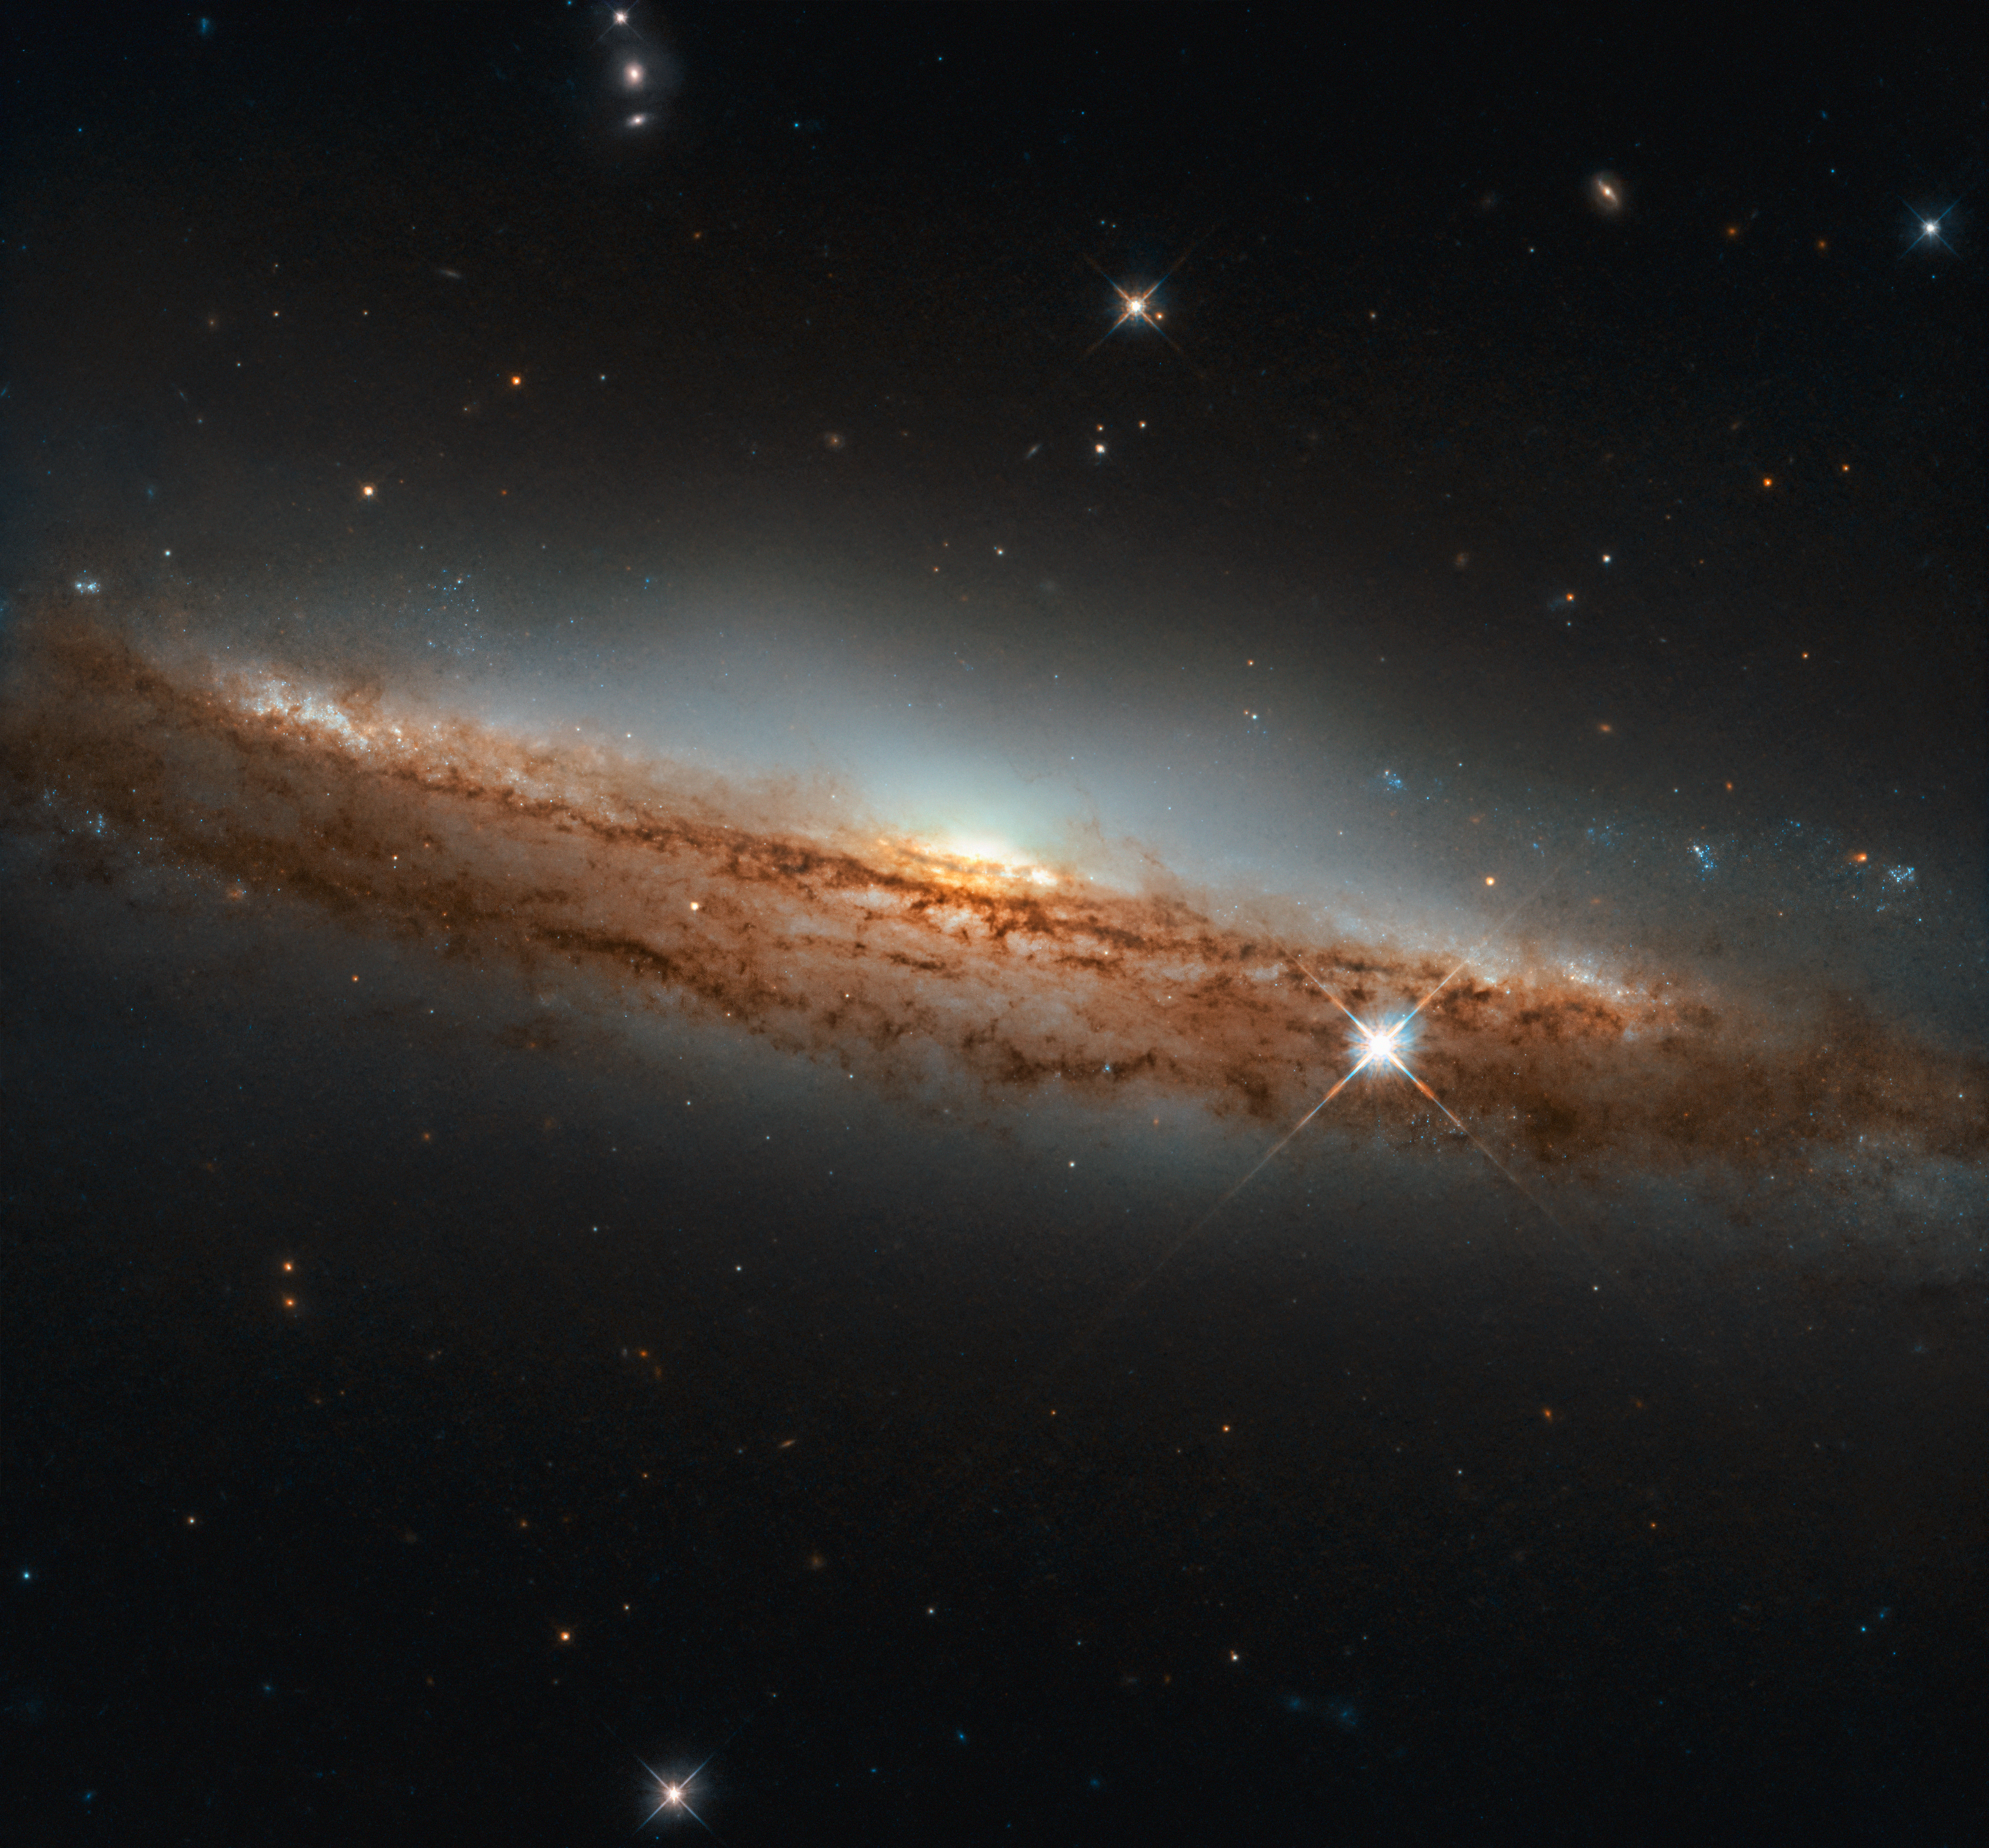

A Spiral in Profile

The NASA/ESA Hubble Space Telescope sees galaxies of all shapes, sizes, brightnesses, and orientations in the cosmos. Sometimes, the telescope gazes at a galaxy oriented sideways — as shown here. The spiral galaxy featured in this Picture of the Week is called NGC 3717, and it is located about 60 million light-years away in the constellation of Hydra (The Sea Serpent).

Seeing a spiral almost in profile, as Hubble has here, can provide a vivid sense of its three-dimensional shape. Through most of their expanse, spiral galaxies are shaped like a thin pancake. At their cores, though, they have bright, spherical, star-filled bulges that extend above and below this disc, giving these galaxies a shape somewhat like that of a flying saucer when they are seen edgeon.

NGC 3717 is not captured perfectly edge-on in this image; the nearer part of the galaxy is tilted ever so slightly down, and the far side tilted up. This angle affords a view across the disc and the central bulge (of which only one side is visible).

Credit: ESA/Hubble & NASA, D. Rosario